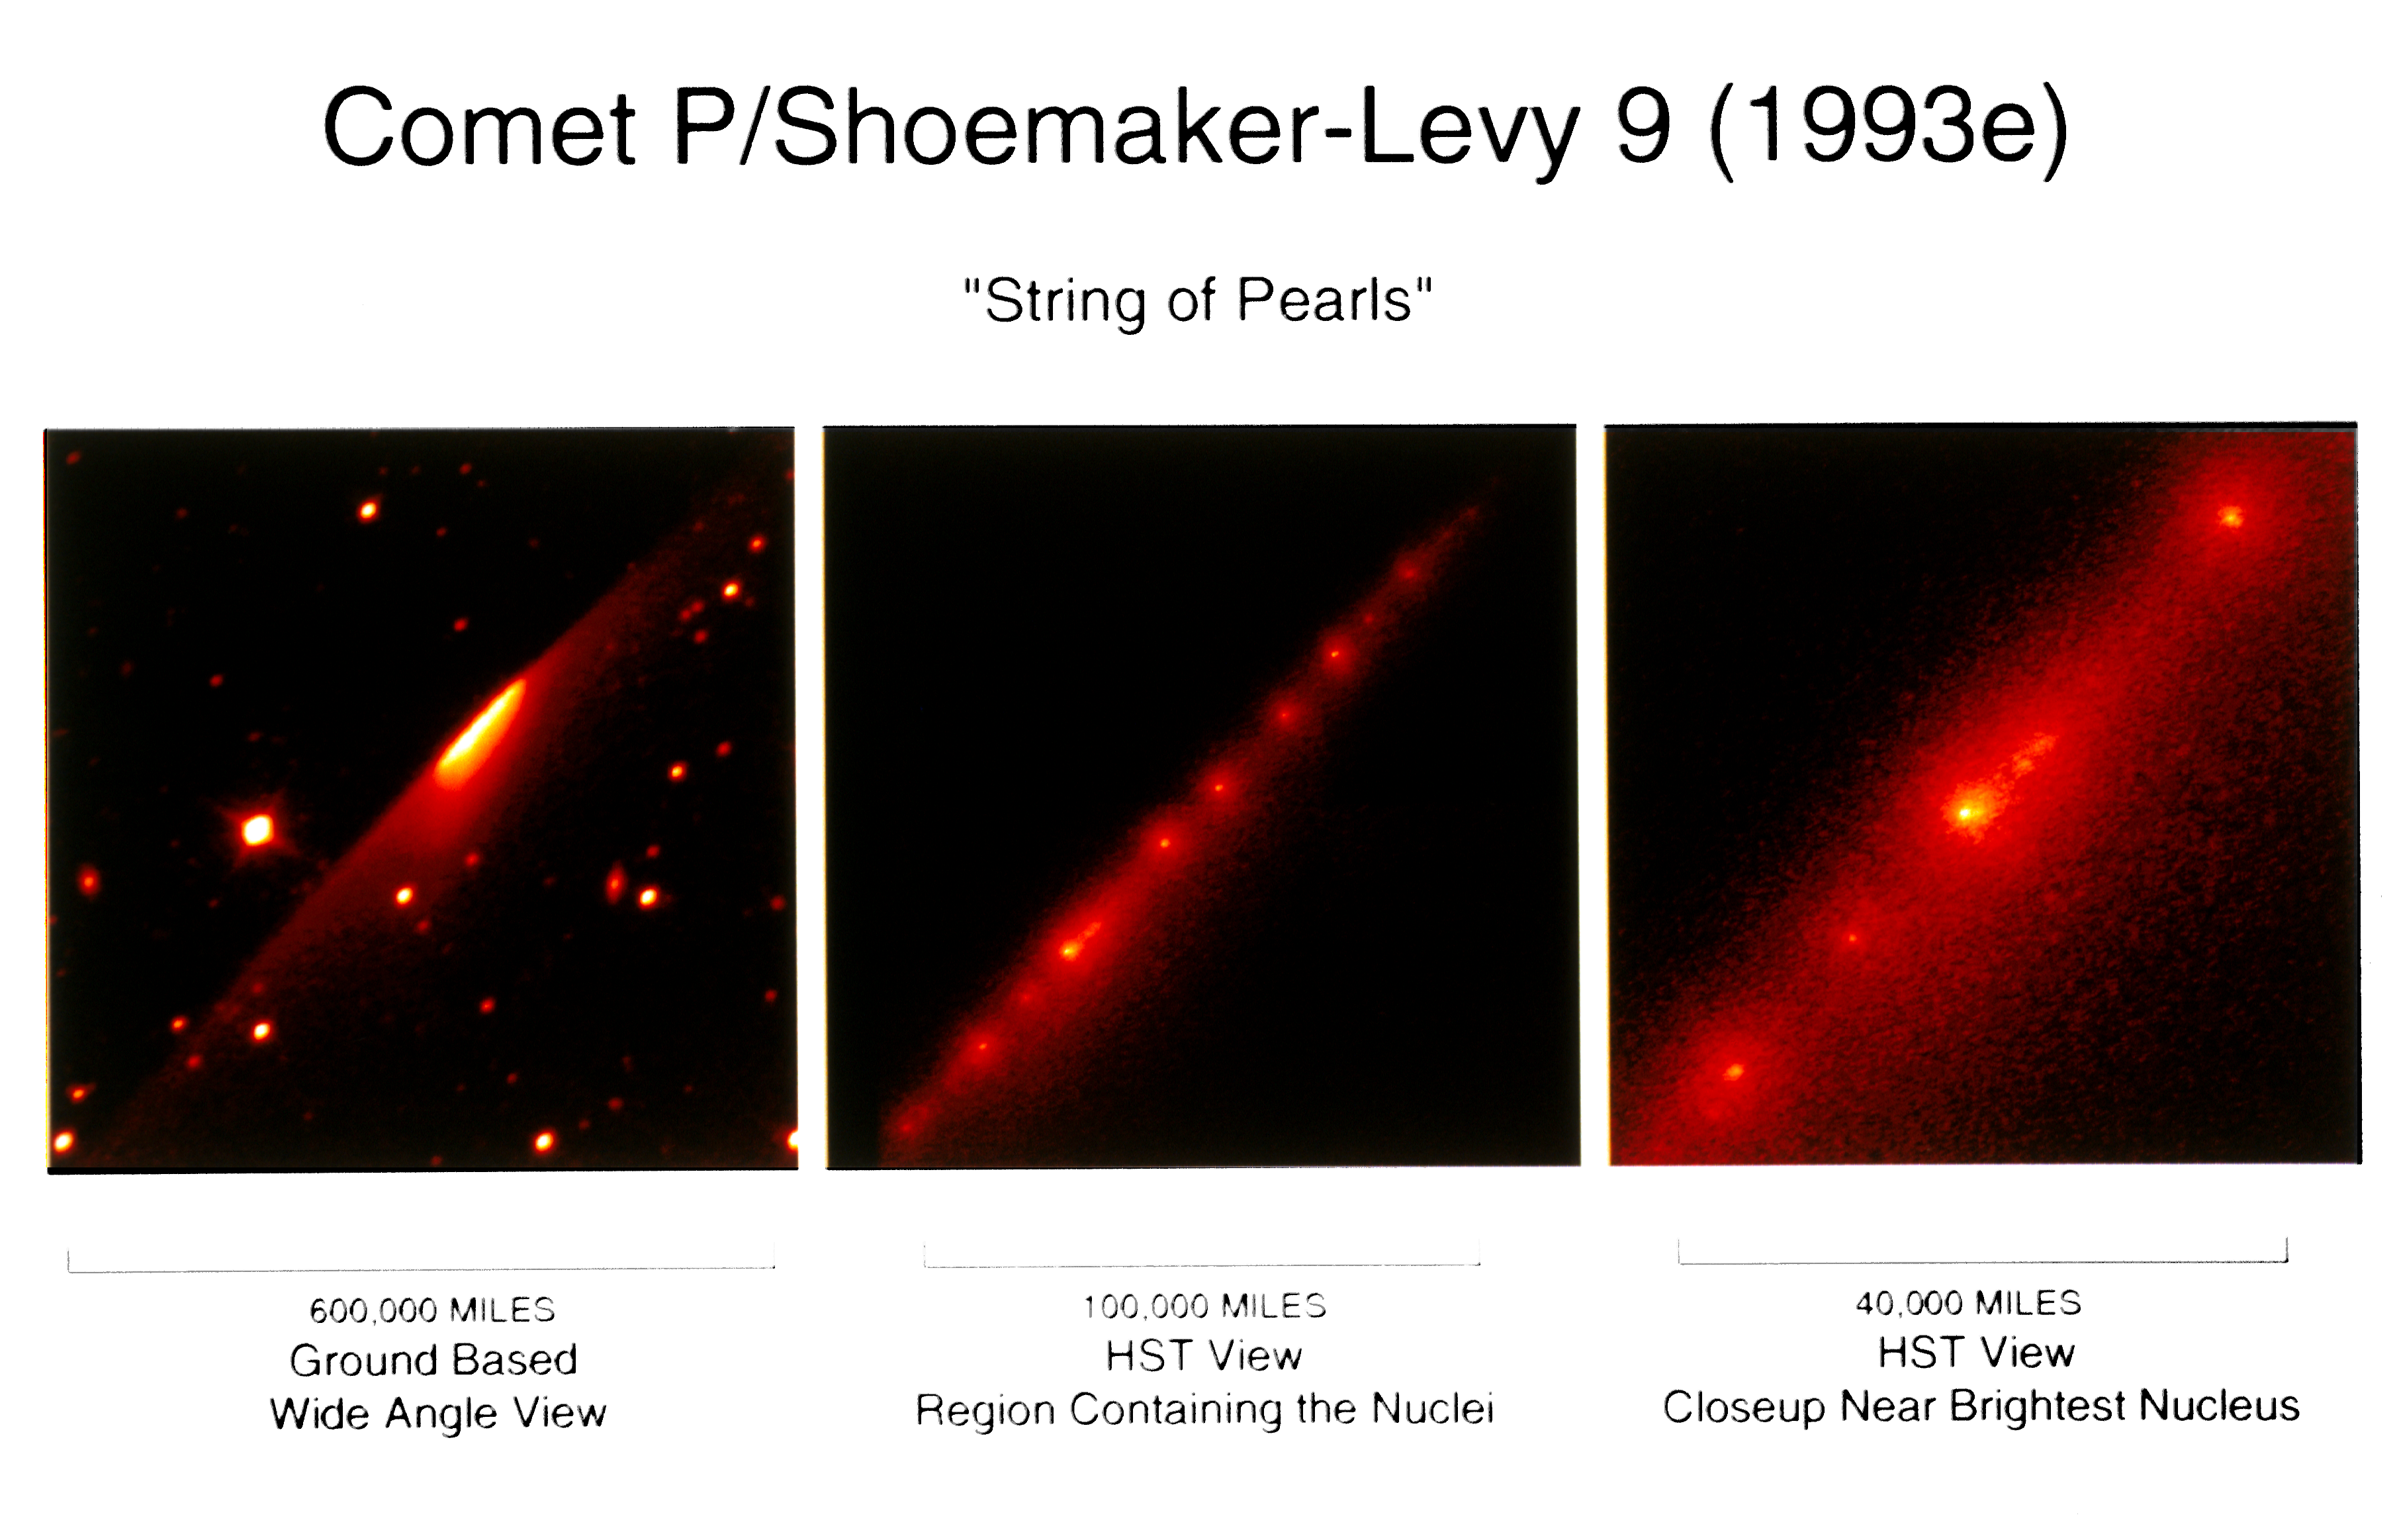

Hubble Telescope Image of the "String of Pearls" Comet

A NASA/ESA Hubble Space Telescope image of approximately 20 objects that comprise comet P/Shoemaker-Levy 9, giving it the resemblance of a "string of pearls." The comet is hurtling toward a July 1994 collision with the giant planet Jupiter.

Rubble's high resolution shows that the comet's nuclei are much smaller than originally estimated from observations with ground-based telescopes. The Hubble observations show that the nuclei are probably less than three miles (5 km) across, as opposed to earlier estimates of nine miles (14 km).

Credit: Dr. H. A. Weaver and Mr. T. E. Smith, STScI NASA/ESA